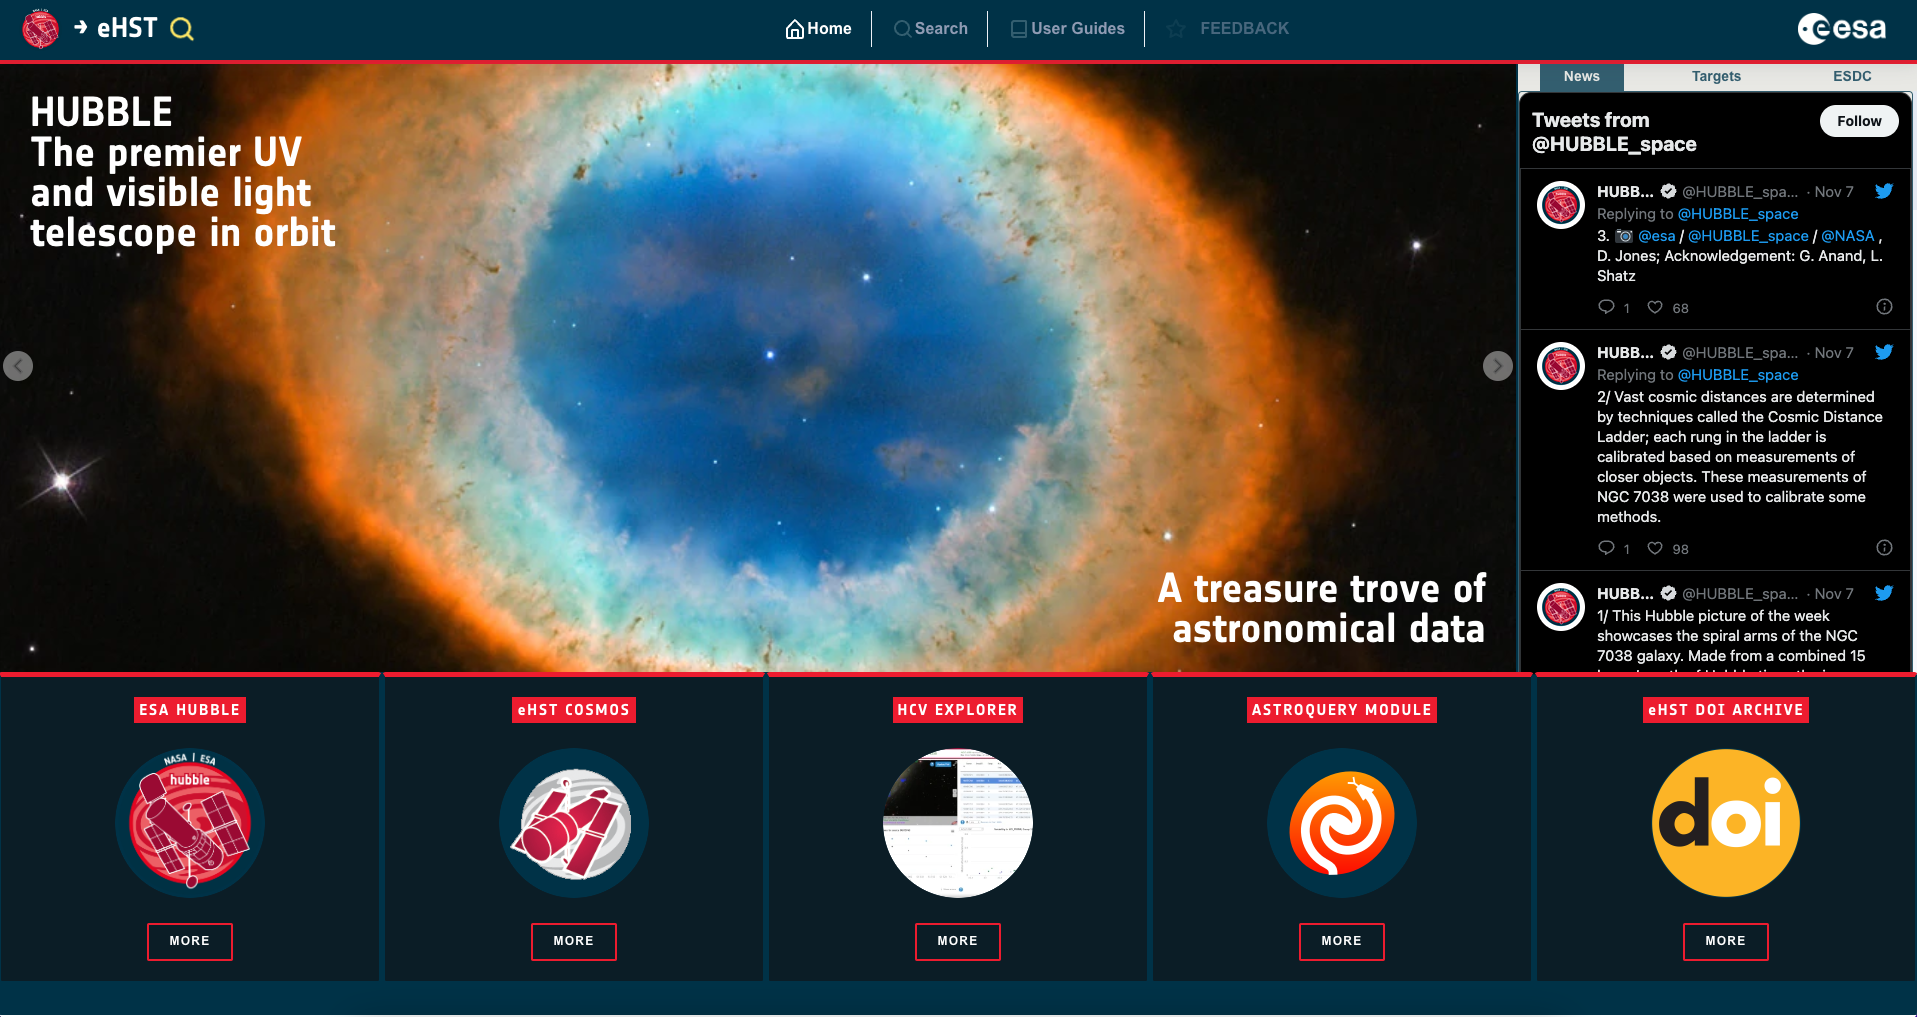

eHST User Interface

This is a screenshot of the new eHST home user interface.

Credit: ESA/Hubble